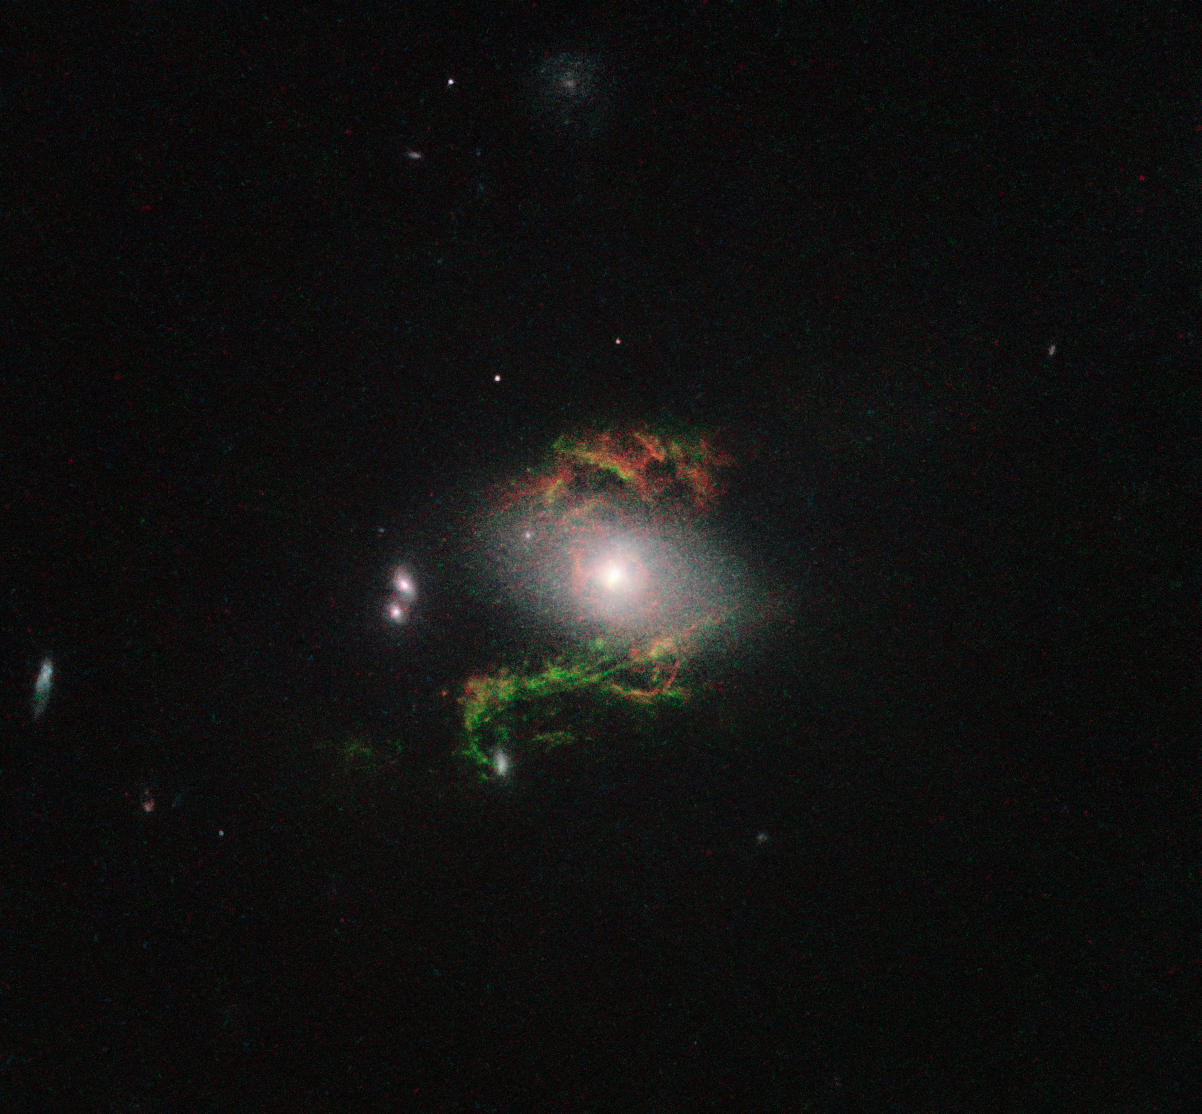

Hubble view of green filament in galaxy 2MASX J15100402+0740370

This new NASA/ESA Hubble Space Telescope image shows ghostly green filaments, lying within galaxy 2MASX J15100402+0740370. This filament was illuminated by a blast of radiation from a quasar — a very luminous and compact region that surrounds the supermassive black hole at the centre of its host galaxy.

Its bright green hue is a result of ionised oxygen, which glows brightly at green wavelengths.

Credit: NASA, ESA, W. Keel (University of Alabama, USA)